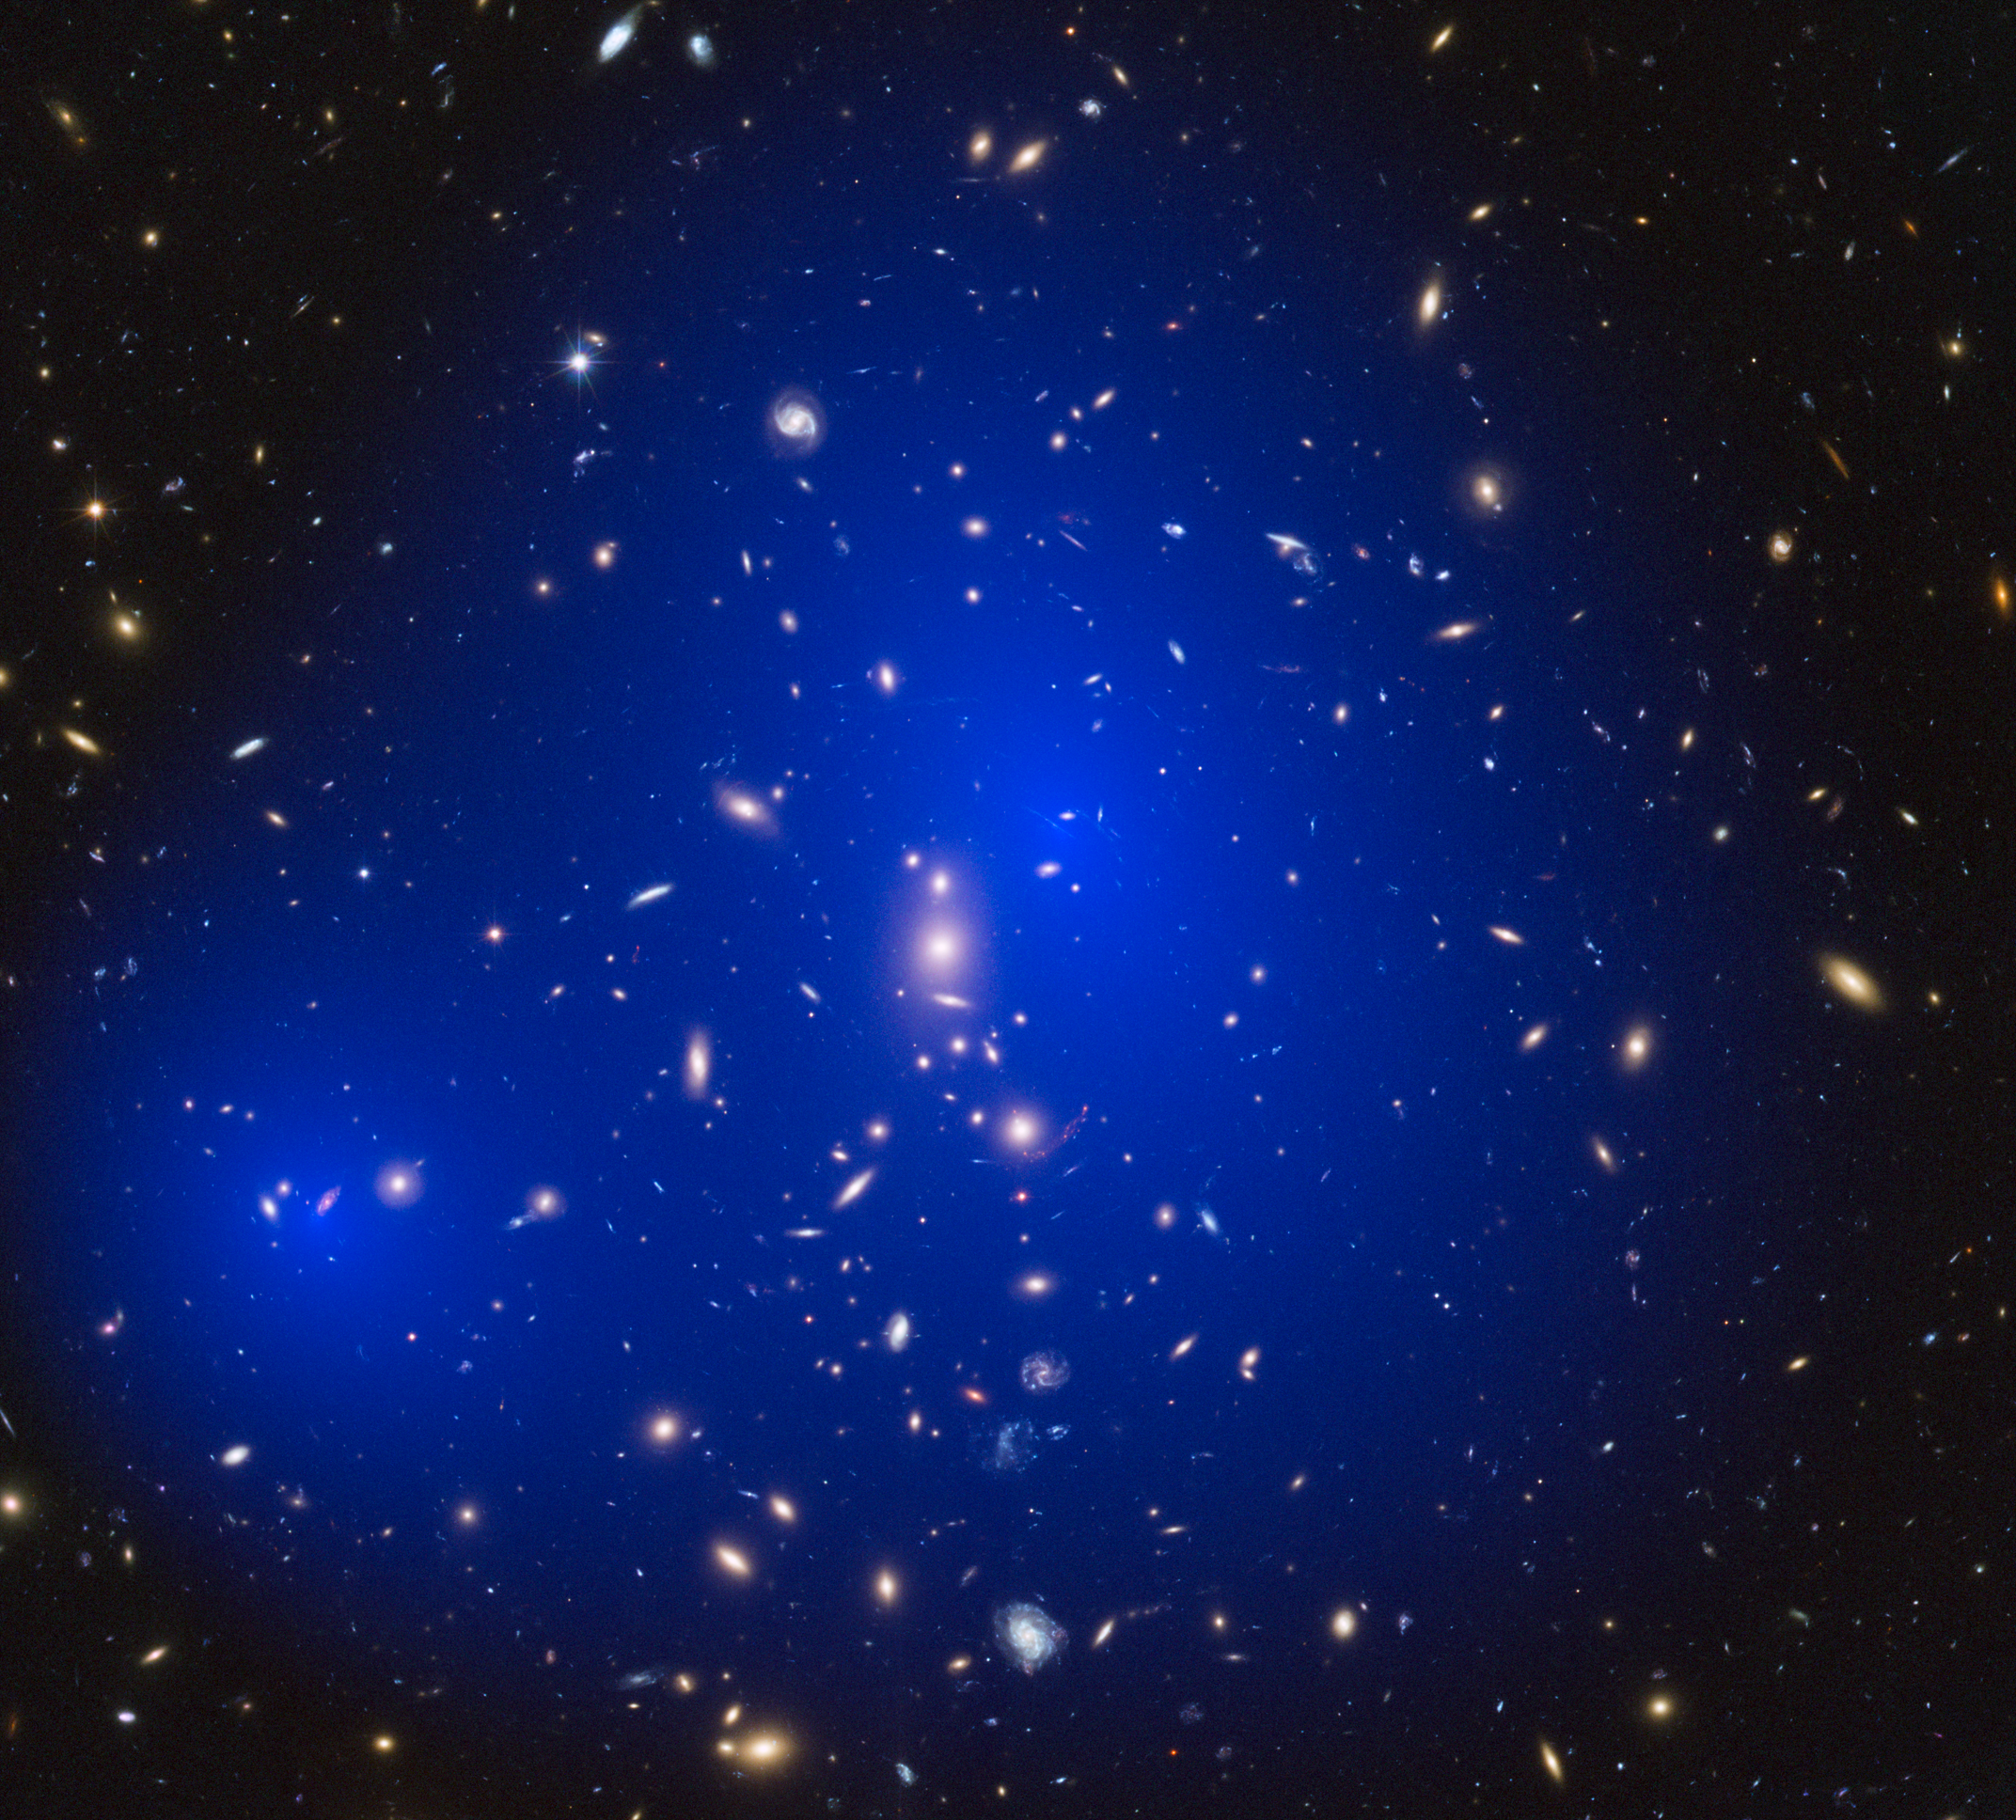

Galaxy cluster ZwCl 1358+62 with dark matter map

This is a NASA/ESA Hubble Space Telescope image of the galaxy cluster ZwCl 1358+62. Shown in blue on the image is a map of the dark matter found within the cluster. This cluster was part of a study of 72 galaxy cluster collisions which determined that dark matter interacts with other dark matter even less than previously thought.

Credit: NASA, ESA, D. Harvey (École Polytechnique Fédérale de Lausanne, Switzerland), R. Massey (Durham University, UK) and Johan Richard (Caltech, USA)